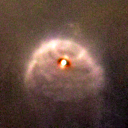

181-825

One of 42 new proplyds discovered in the Orion Nebula, 181-825 is one of the bright proplyds that lies relatively close to the nebula’s brightest star, Theta 1 Orionis C. Resembling a tiny jellyfish, this proplyd is surrounded by a shock wave that is caused by stellar wind from the massive Theta 1 Orionis C interacting with gas in the nebula.

Credit: NASA/ESA and L. Ricci (ESO)